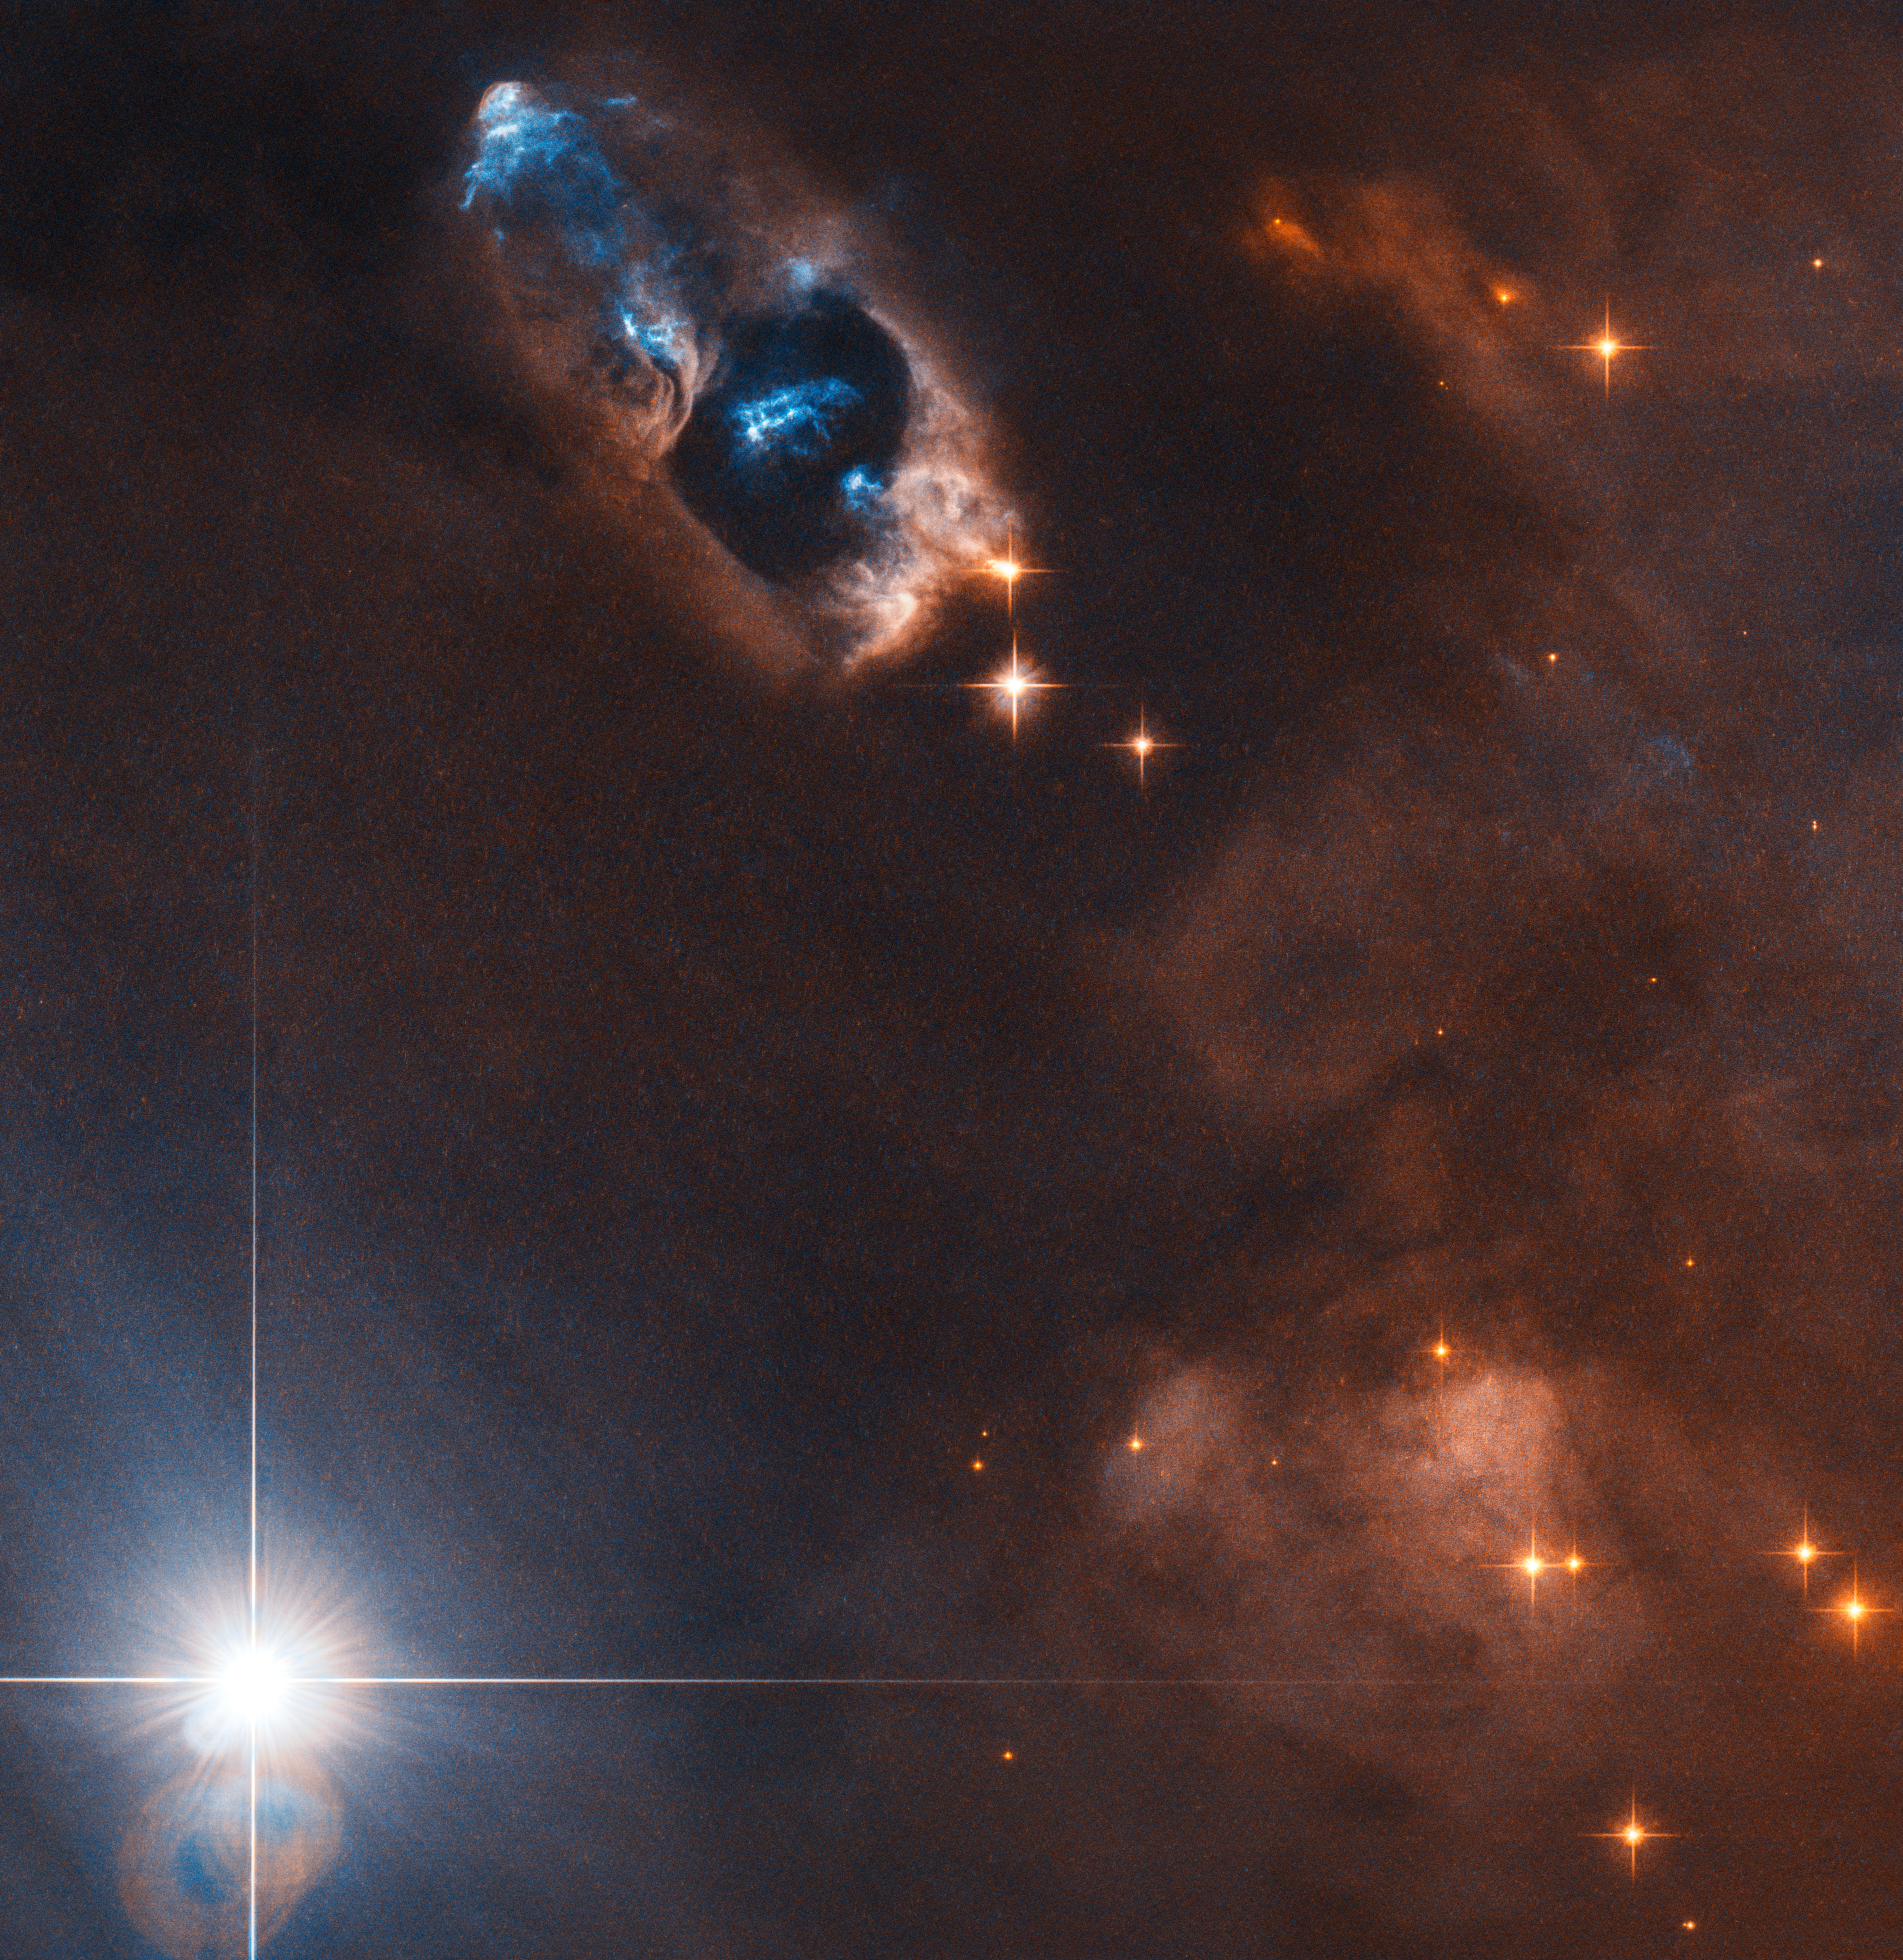

The smoking gun of a newborn star

In this image the NASA/ESA Hubble Space Telescope has captured the smoking gun of a newborn star, the Herbig–Haro objects numbered 7 to 11 (HH 7–11). These five objects, visible in blue in the top centre of the image, lie within NGC 1333, a reflection nebula full of gas and dust found about a thousand light-years away from Earth.

Herbig-Haro objects like HH 7–11 are transient phenomena. Travelling away from the star that created them, at a speed of up to 250 000 kilometres per hour they disappear into nothingness within a few tens of thousands of years. The young star that is the source of HH 7-11 is called SVS 13 and all five objects are moving away from SVS 13 toward the upper left. The current distance between HH 7 and SVS 13 is about 20 000 times the distance between Earth and the Sun.

Herbig–Haro objects are formed when jets of ionised gas ejected by a young star collide with nearby clouds of gas and dust at high speeds. The Herbig-Haro objects visible in this image are no exception to this and were formed when the jets from the newborn star SVS 13 collided with the surrounding clouds. These collisions created the five brilliant clumps of light within the reflection nebula.

Credit: ESA/Hubble & NASA, K. Stapelfeldt